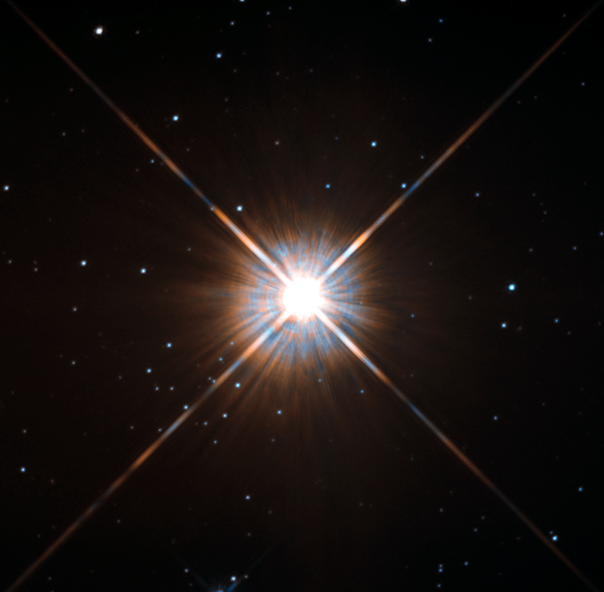

New shot of Proxima Centauri, our nearest neighbour

Shining brightly in this Hubble image is our closest stellar neighbour: Proxima Centauri.

Proxima Centauri lies in the constellation of Centaurus (The Centaur), just over four light-years from Earth. Although it looks bright through the eye of Hubble, as you might expect from the nearest star to the Solar System, Proxima Centauri is not visible to the naked eye. Its average luminosity is very low, and it is quite small compared to other stars, at only about an eighth of the mass of the Sun.

However, on occasion, its brightness increases. Proxima is what is known as a “flare star”, meaning that convection processes within the star’s body make it prone to random and dramatic changes in brightness. The convection processes not only trigger brilliant bursts of starlight but, combined with other factors, mean that Proxima Centauri is in for a very long life. Astronomers predict that this star will remain middle-aged — or a “main sequence” star in astronomical terms — for another four trillion years, some 300 times the age of the current Universe.

These observations were taken using Hubble’s Wide Field and Planetary Camera 2 (WFPC2). Proxima Centauri is actually part of a triple star system — its two companions, Alpha Centauri A and B, lie out of frame.

Although by cosmic standards it is a close neighbour, Proxima Centauri remains a point-like object even using Hubble’s eagle-eyed vision, hinting at the vast scale of the Universe around us.

Credit: ESA/Hubble & NASA